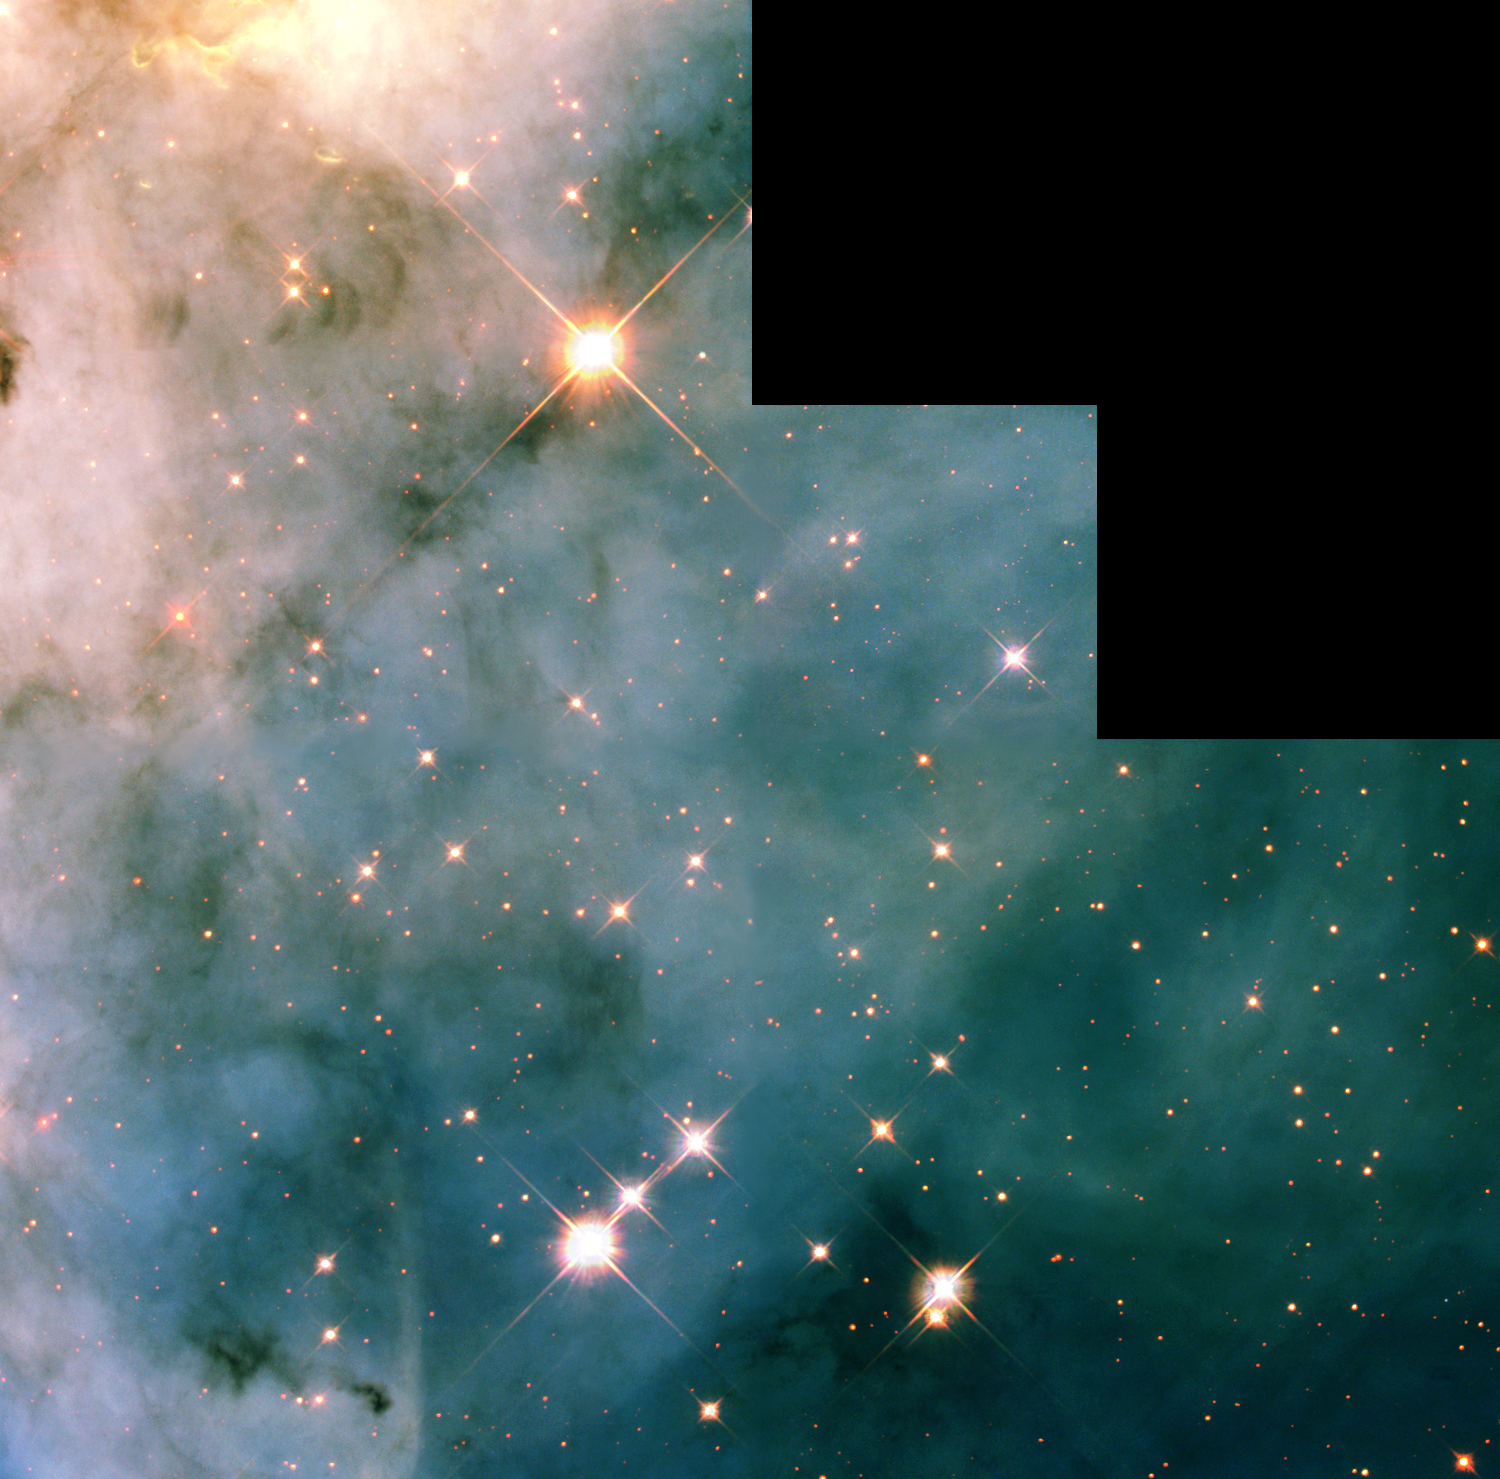

WFPC2 Mosaic of Carina Nebula Region

This NASA Hubble Space Telescope close-up view, taken with the Wide Field Planetary Camera, shows a three light-year-wide portion of the Carina Nebula, which has a diameter of over 200 light-years. This region in the Carina Nebula is between two large clusters of some of the hottest and most massive stars known.

The dramatic dark dust knots and complex structures captured in this image are sculpted by the high-velocity stellar winds and high-energy radiation from an ultra-luminous variable star called Eta Carinae.

Credit: NASA/ESA and The Hubble Heritage Team (STScI/AURA)